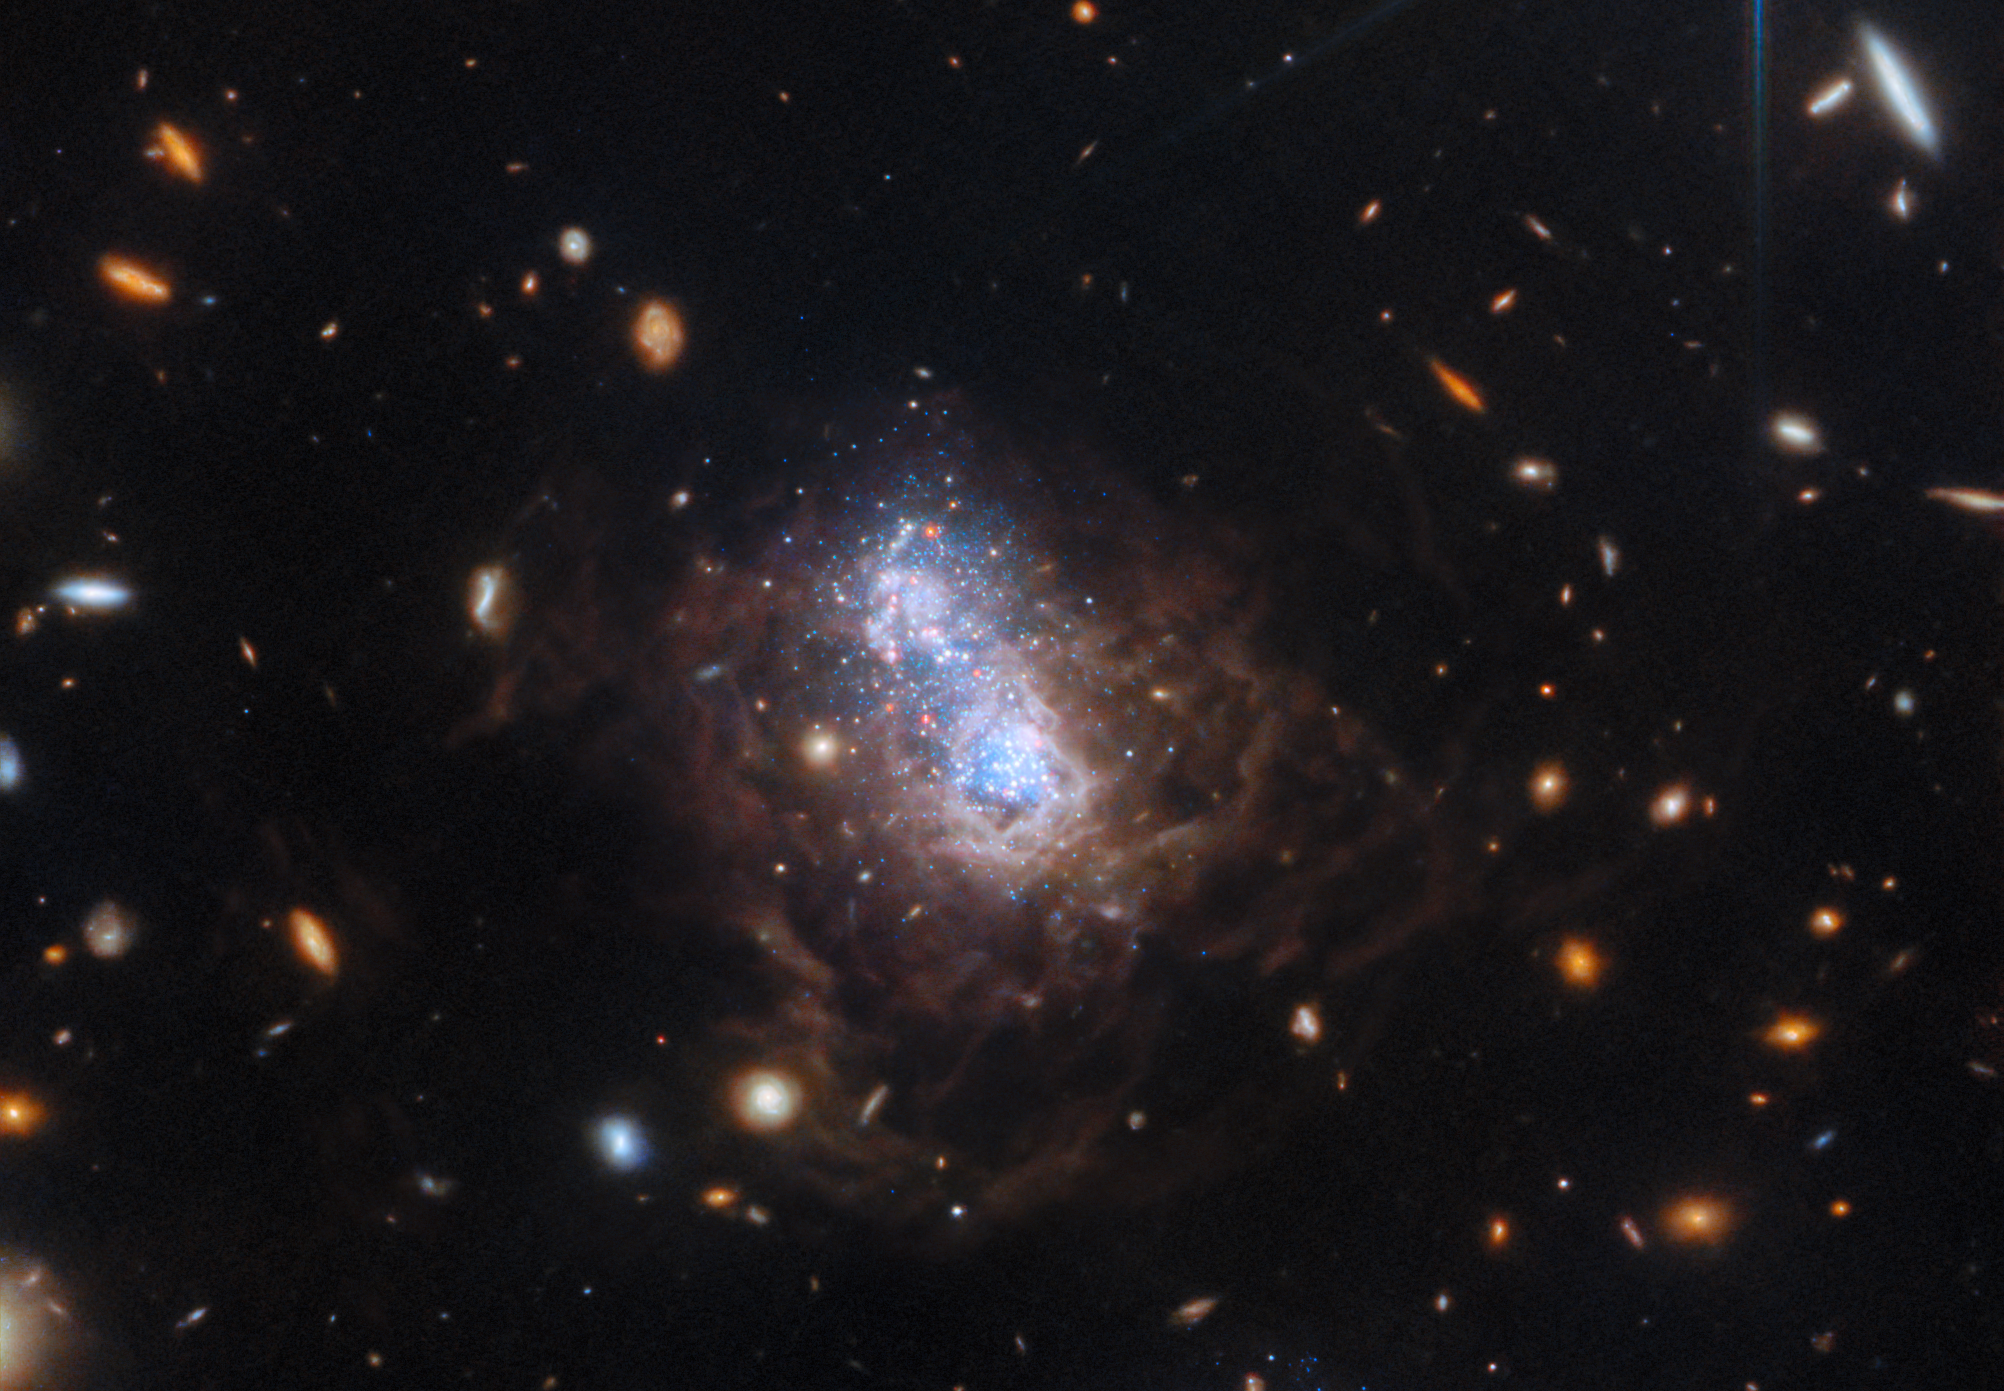

A duo of starbursts in I Zwicky 18

The NASA/ESA/CSA James Webb Space Telescope has captured a spectacular view of the galaxy I Zwicky 18 (I Zw 18) in this new image. The galaxy was first identified by Swiss astronomer Fritz Zwicky in the 1930’s and resides roughly 59 million light-years from Earth.

This galaxy has gone through several sudden bursts of star formation. This galaxy is typical of the kinds of galaxies that inhabited the early Universe and it is classified as a dwarf irregular galaxy (much smaller than our Milky Way).

Two major starburst regions are embedded in the heart of the galaxy. The wispy brown filaments surrounding the central starburst region are bubbles of gas that have been heated by stellar winds and intense ultraviolet radiation unleashed by hot, young stars. A companion galaxy resides nearby to the dwarf galaxy, which can be seen at the bottom of the wider-field image. The companion may be interacting with the dwarf galaxy and may have triggered that galaxy's recent star formation. The orange blobs surrounding the dwarf galaxy are the dim glow from ancient fully formed galaxies at much larger distances.

This image was taken as part of a Webb programme to study the life cycle of dust in I Zw 18. Scientists are now building off of previous research with Hubble obtained at optical wavelengths, studying individual dusty stars in detail with Webb’s equivalent spatial resolution and sensitivity at infrared wavelengths. This galaxy is of particular interest as its content of elements heavier than helium is one of the lowest of all known galaxies in the local Universe. Such conditions are thought to be similar to those in some of the first star-forming galaxies at high redshift, so the Webb study of I Zw 18 should shed light on the life-cycle of stars and dust in the early Universe.

Although previously believed to have only just recently begun forming its first generation of stars, the NASA/ESA Hubble Space Telescope found fainter, older red stars contained within the galaxy, suggesting its star formation started at least one billion years ago and possibly as much as 10 billion years ago. The galaxy, therefore, may have formed at the same time as most other galaxies.

The new observations from Webb have revealed the detection of a set of candidate dusty evolved stars. It also provides details about Zw 18’s two dominant star-forming regions. Webb’s new data suggest that the dominant bursts of star formation in these regions occurred at different times. The strongest starburst activity is now believed to have happened more recently in the northwest lobe as compared to the galaxy’s southeast lobe. This is based on the relative populations of younger versus older stars found in each of the lobes.

Credit: ESA/Webb, NASA, CSA, A. Hirschauer, M. Meixner et al.